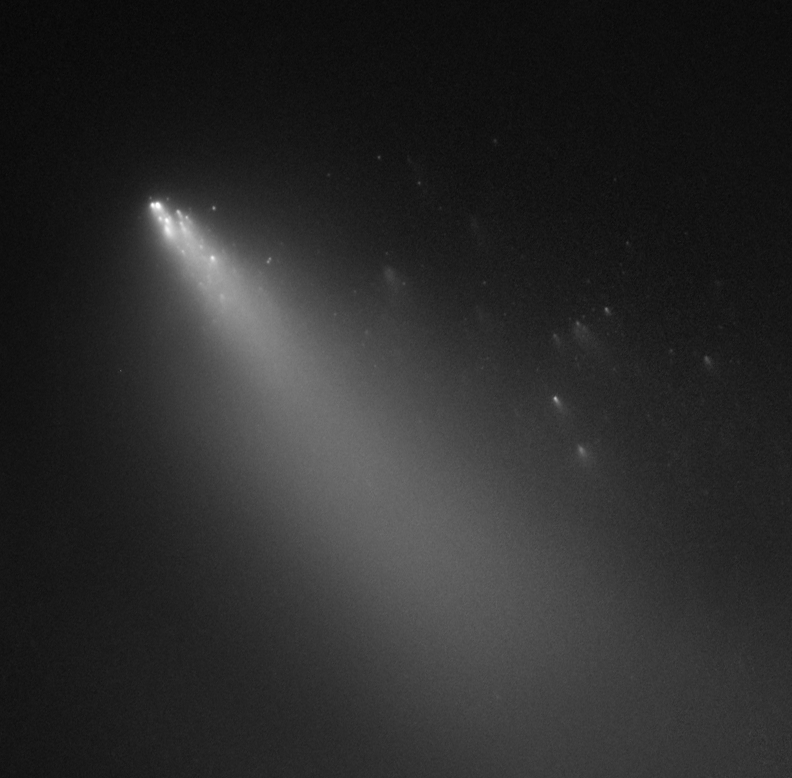

Comet 73P/Schwassmann-Wachmann 3 - Fragment G [18 April 2006]

Comet 73P/Schwassmann-Wachmann 3's Fragment G.

Credit: NASA, ESA, H. Weaver (APL/JHU), M. Mutchler and Z. Levay (STScI)